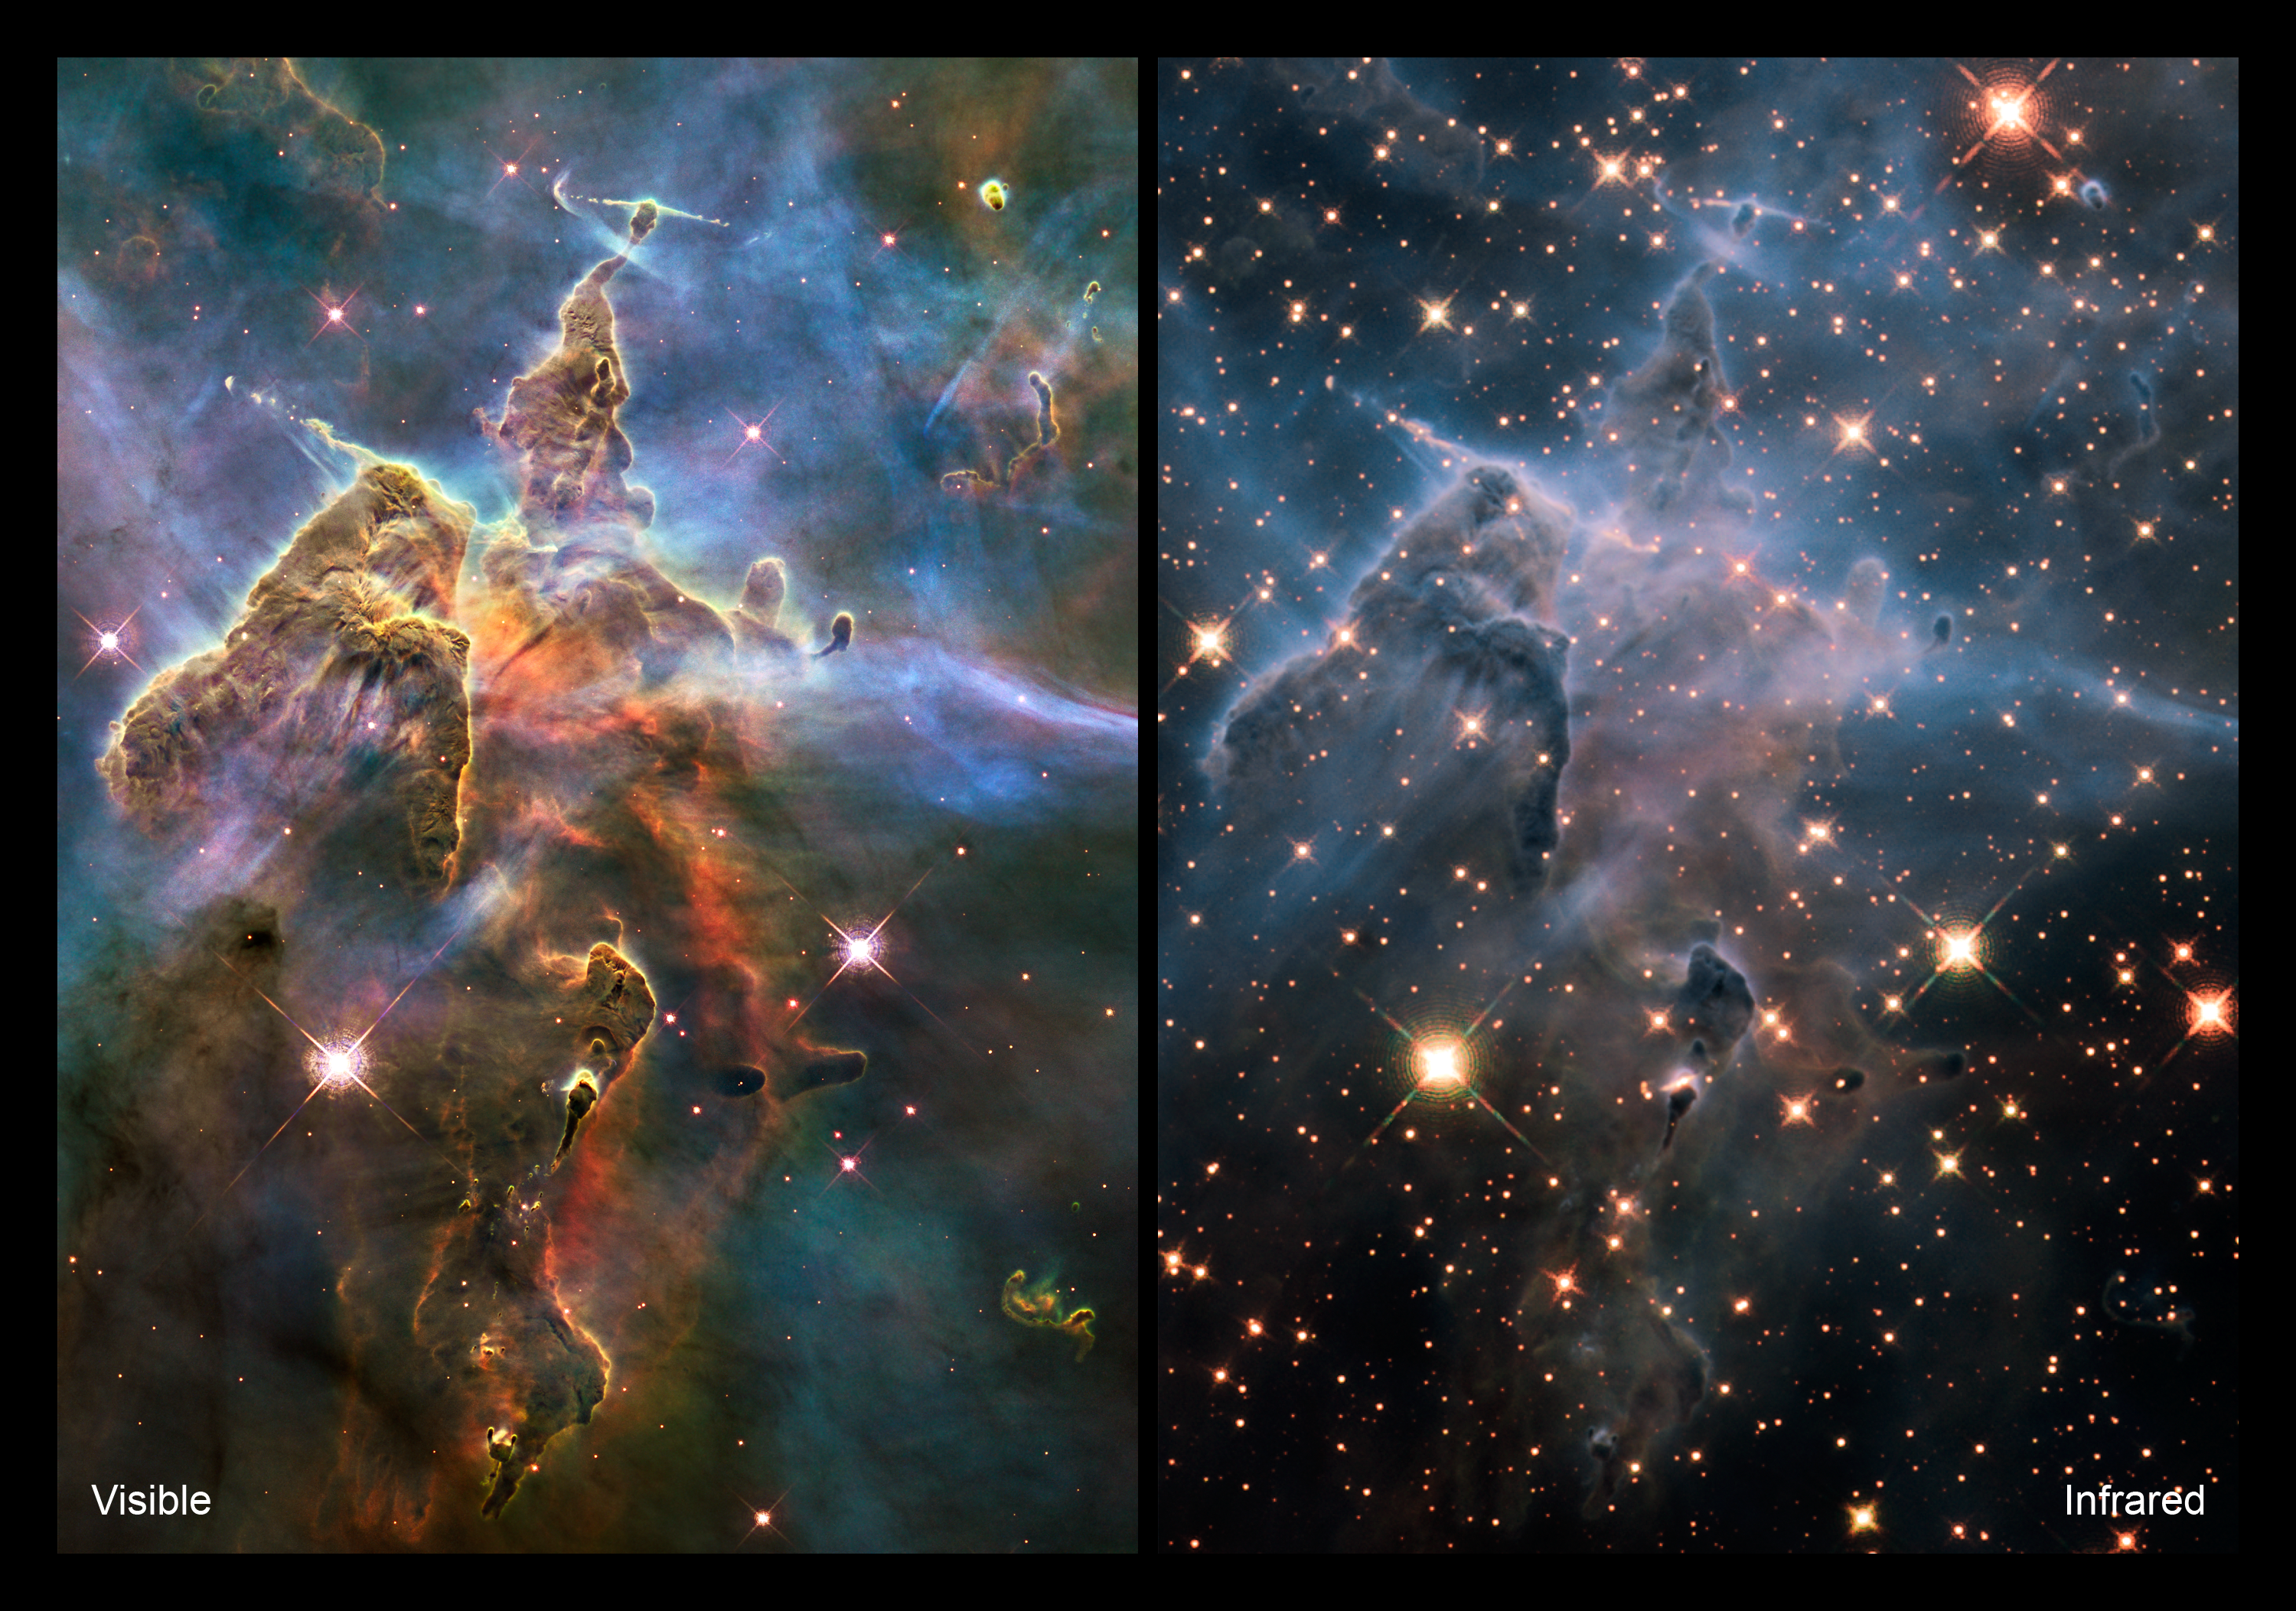

Comparison views of “Mystic Mountain”

These two images of a pillar of star birth, three light-years high, demonstrate how observations taken in visible and infrared light by the NASA/ESA Hubble Space Telescope reveal dramatically different and complementary views of an object. The pair of images demonstrates how Hubble’s new panchromatic view of the Universe shows striking differences between visible and infrared wavelengths. This turbulent cosmic pinnacle lies within a tempestuous stellar nursery called the Carina Nebula, located 7500 light-years away in the southern constellation of Carina. The images mark the 20th anniversary of Hubble’s launch and deployment into an orbit around Earth.

[Left] This visible-light view shows how scorching radiation and fast winds (streams of charged particles) from super-hot newborn stars in the nebula are shaping and compressing the pillar, causing new stars to form within it. Infant stars buried inside fire off jets of gas that can be seen streaming from towering peaks. Streamers of hot ionised gas can be seen flowing from the ridges of the structure, and wispy veils of gas and dust, illuminated by starlight, float around it.

The dense parts of the pillar are resisting being eroded by radiation. The colours in this composite image correspond to the glow of oxygen (blue), hydrogen and nitrogen (green), and sulphur (red).

[Right] This near-infrared image shows a myriad of stars behind the gaseous veil of the nebula's background wall of hydrogen, laced with dust. The foreground pillar becomes semi-transparent because infrared light from the background stars penetrates through much of the dust. A few stars inside the pillar also become visible. Representative colours are assigned to three different infrared wavelength ranges.

Hubble’s Wide Field Camera 3 observed the pillar in February/March 2010.

Credit: NASA, ESA, M. Livio and the Hubble 20th Anniversary Team (STScI)